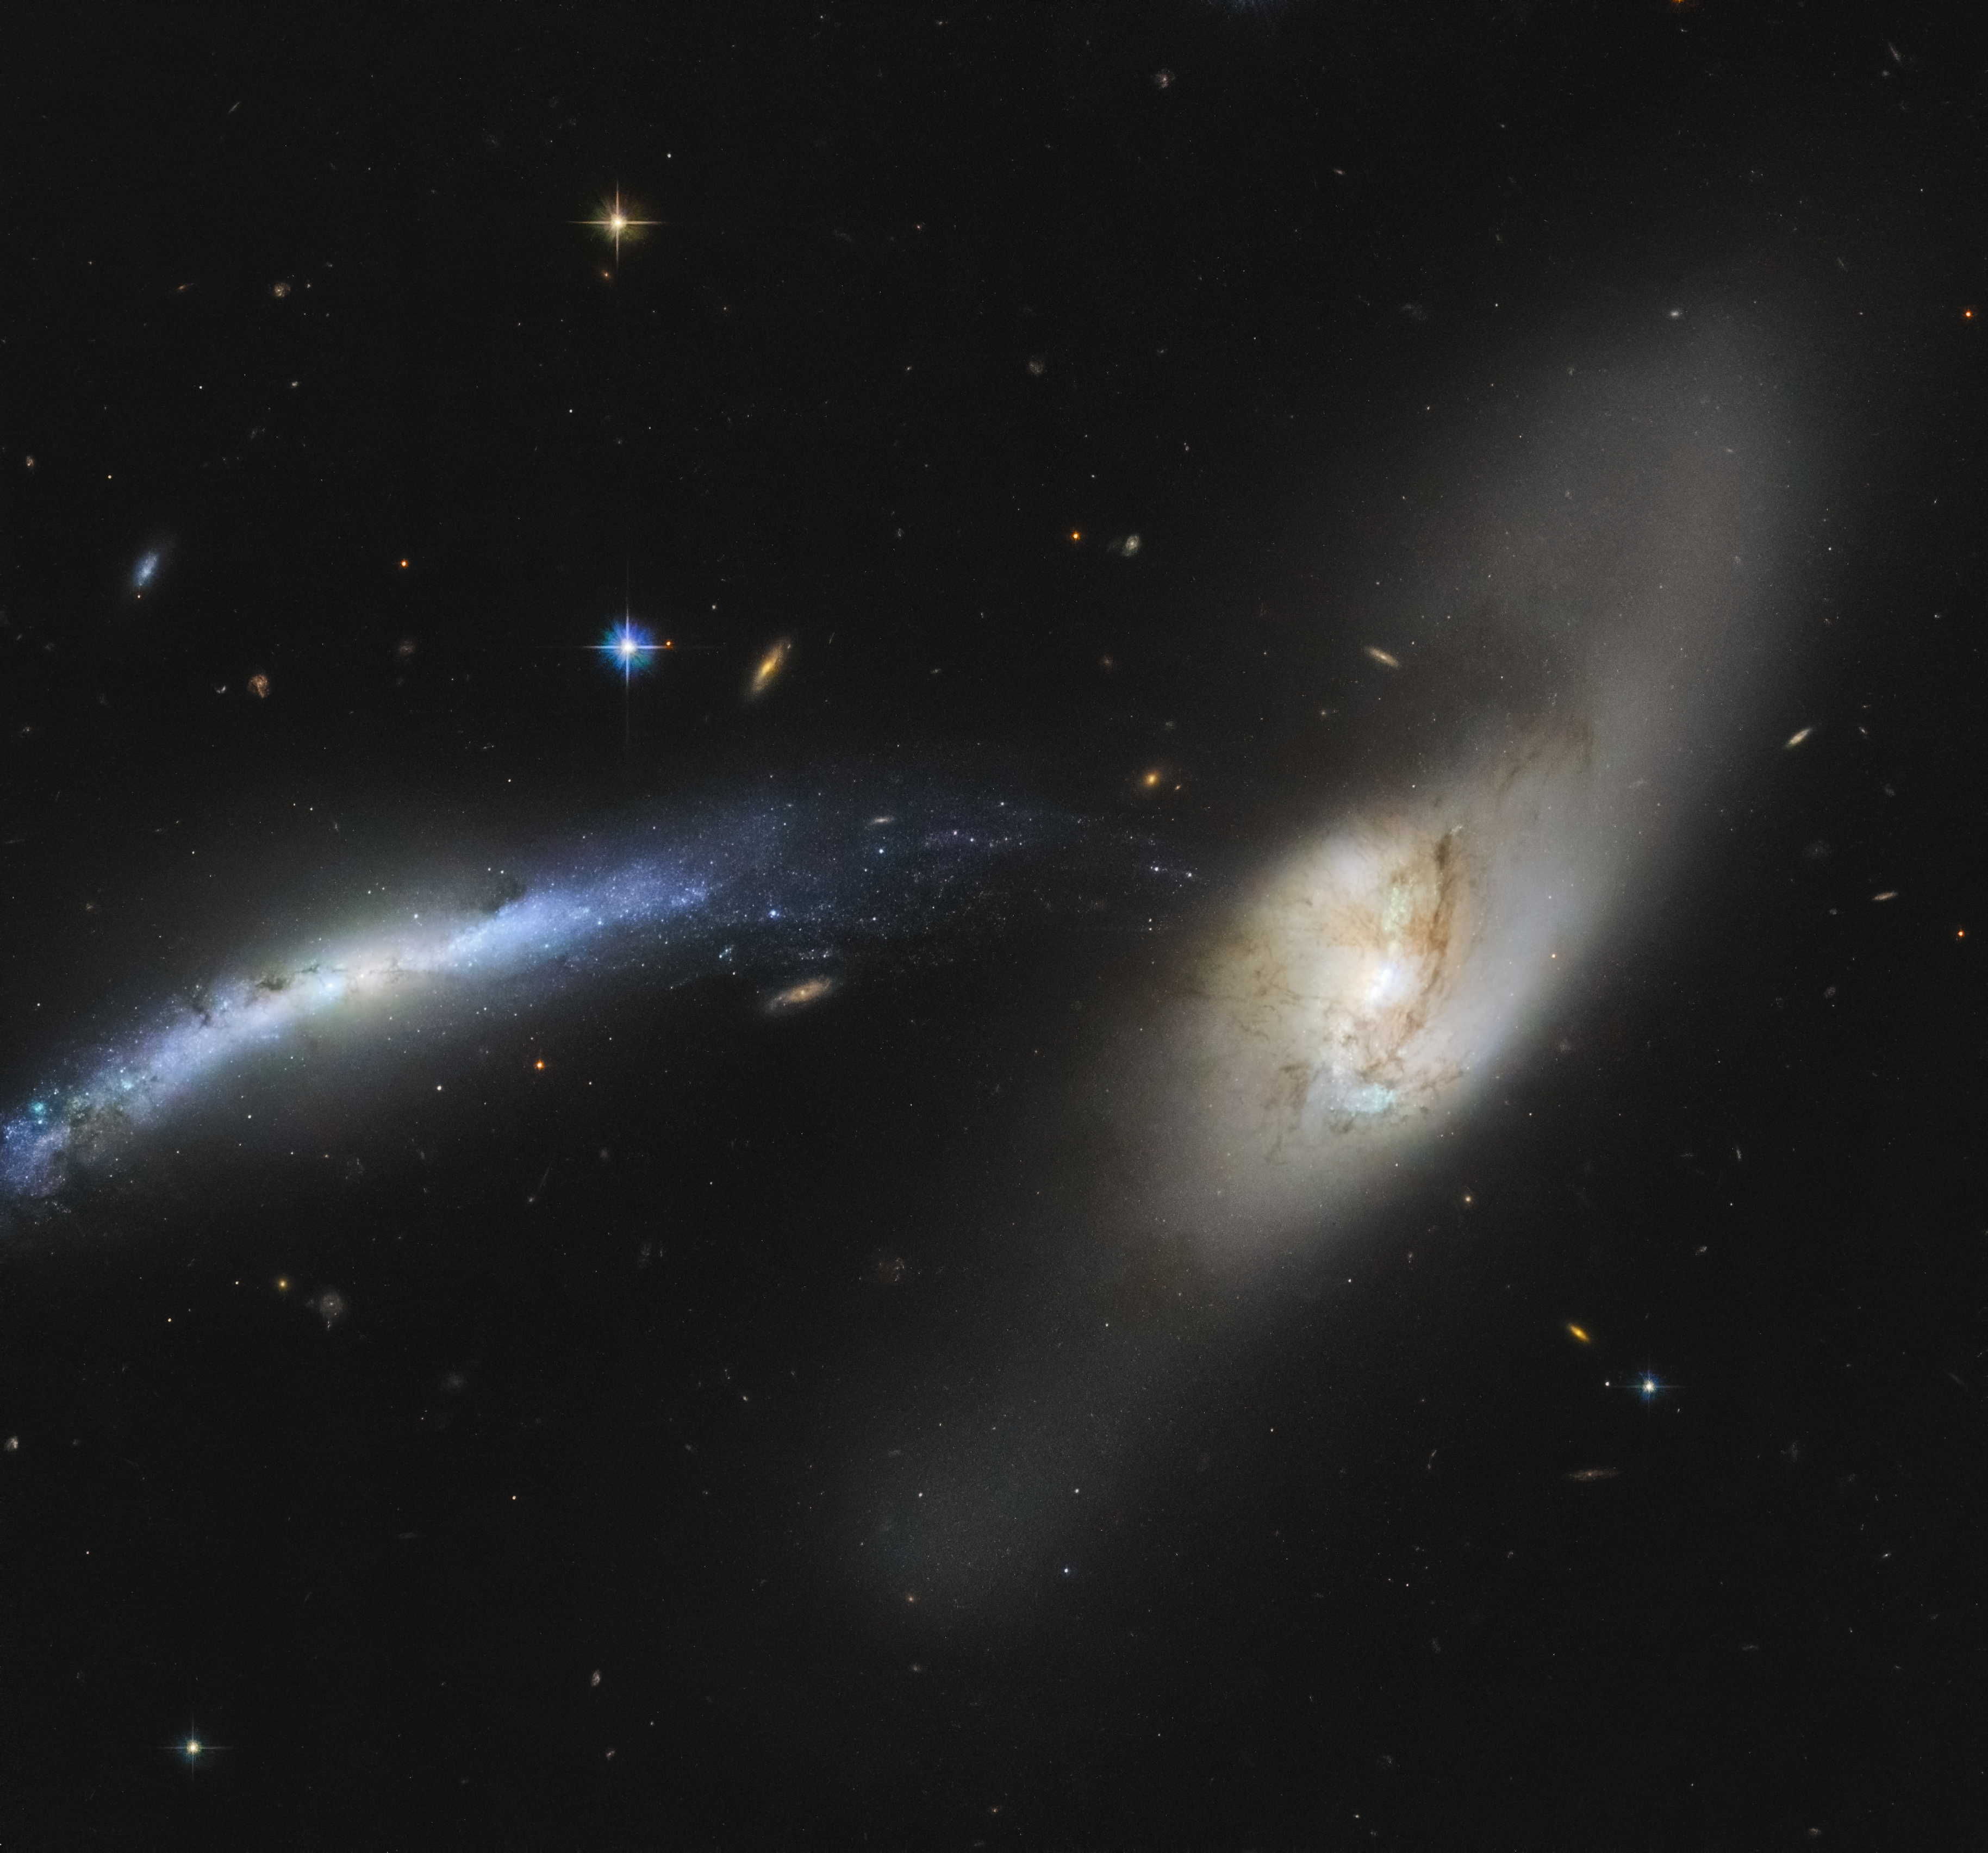

Galactic Waterspout

In this spectacular image captured by the NASA/ESA Hubble Space Telescope, the galaxy NGC 2799 (on the left) is seemingly being pulled into the centre of the galaxy NGC 2798 (on the right).

Interacting galaxies, such as these, are so named because of the influence they have on each other, which may eventually result in a merger or a unique formation. Already, these two galaxies have seemingly formed a sideways waterspout, with stars from NGC 2799 appearing to fall into NGC 2798 almost like drops of water.

Galactic mergers can take place over several hundred million to over a billion years. While one might think the merger of two galaxies would be catastrophic for the stellar systems within, the sheer amount of space between stars means that stellar collisions are unlikely and stars typically drift past each other.

Credit: ESA/Hubble & NASA, SDSS, J. Dalcanton Acknowledgement: Judy Schmidt (Geckzilla)